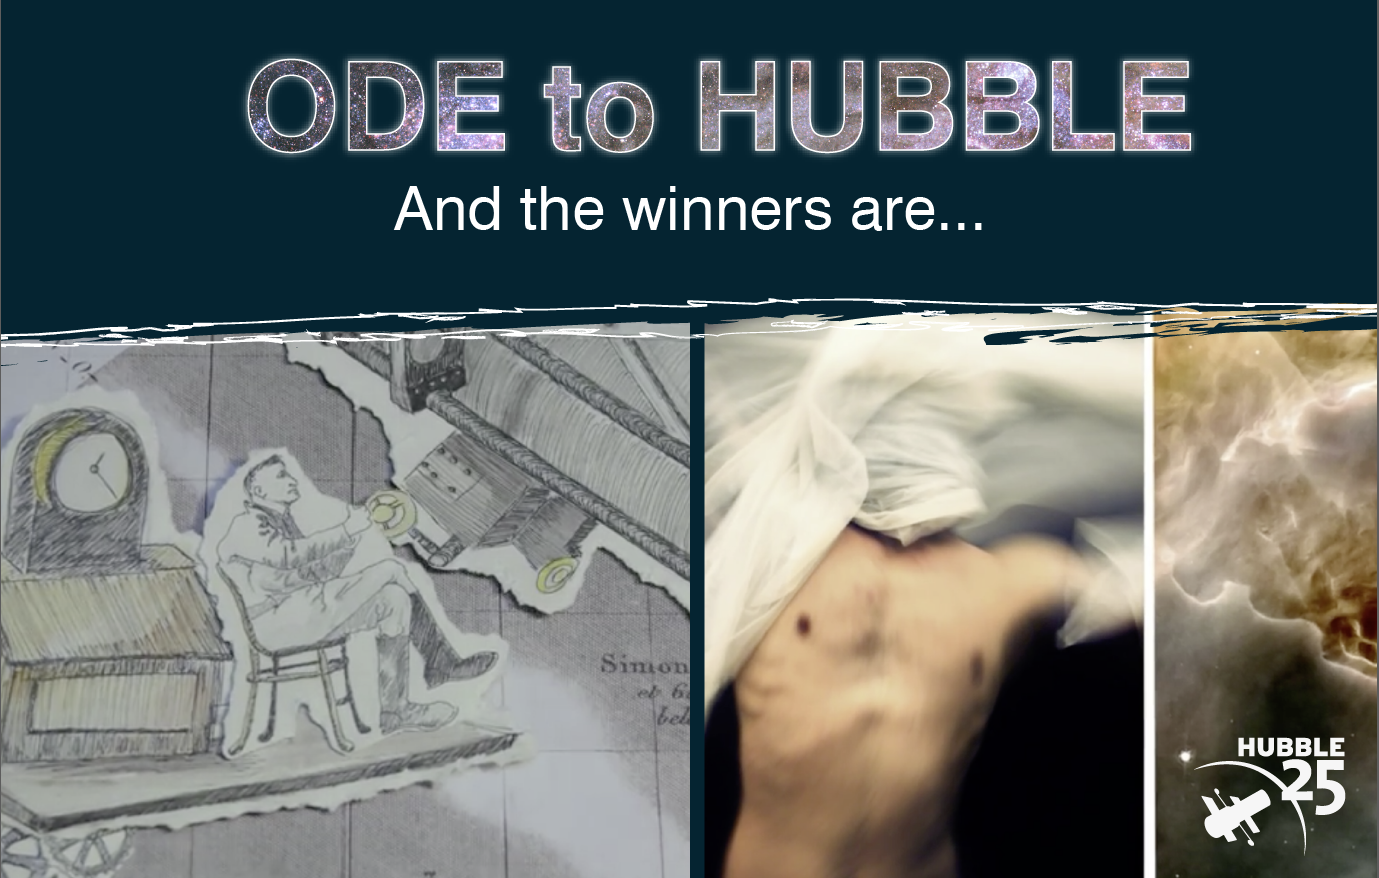

Screenshots from the Ode to Hubble winning videos

This is the promotional image for the winners of the Ode to Hubble competition.

To the right is a screenshot from Desiré de Palacio’s video Bariónica, winner of the over 25s category.

On the left is Hubble’s Universe by Halley Davies and Martin Hellmich, winner in the 25s and under category.

Credit: ESA/Hubble, Desiré de Palacio, Halley Davies and Martin Hellmich